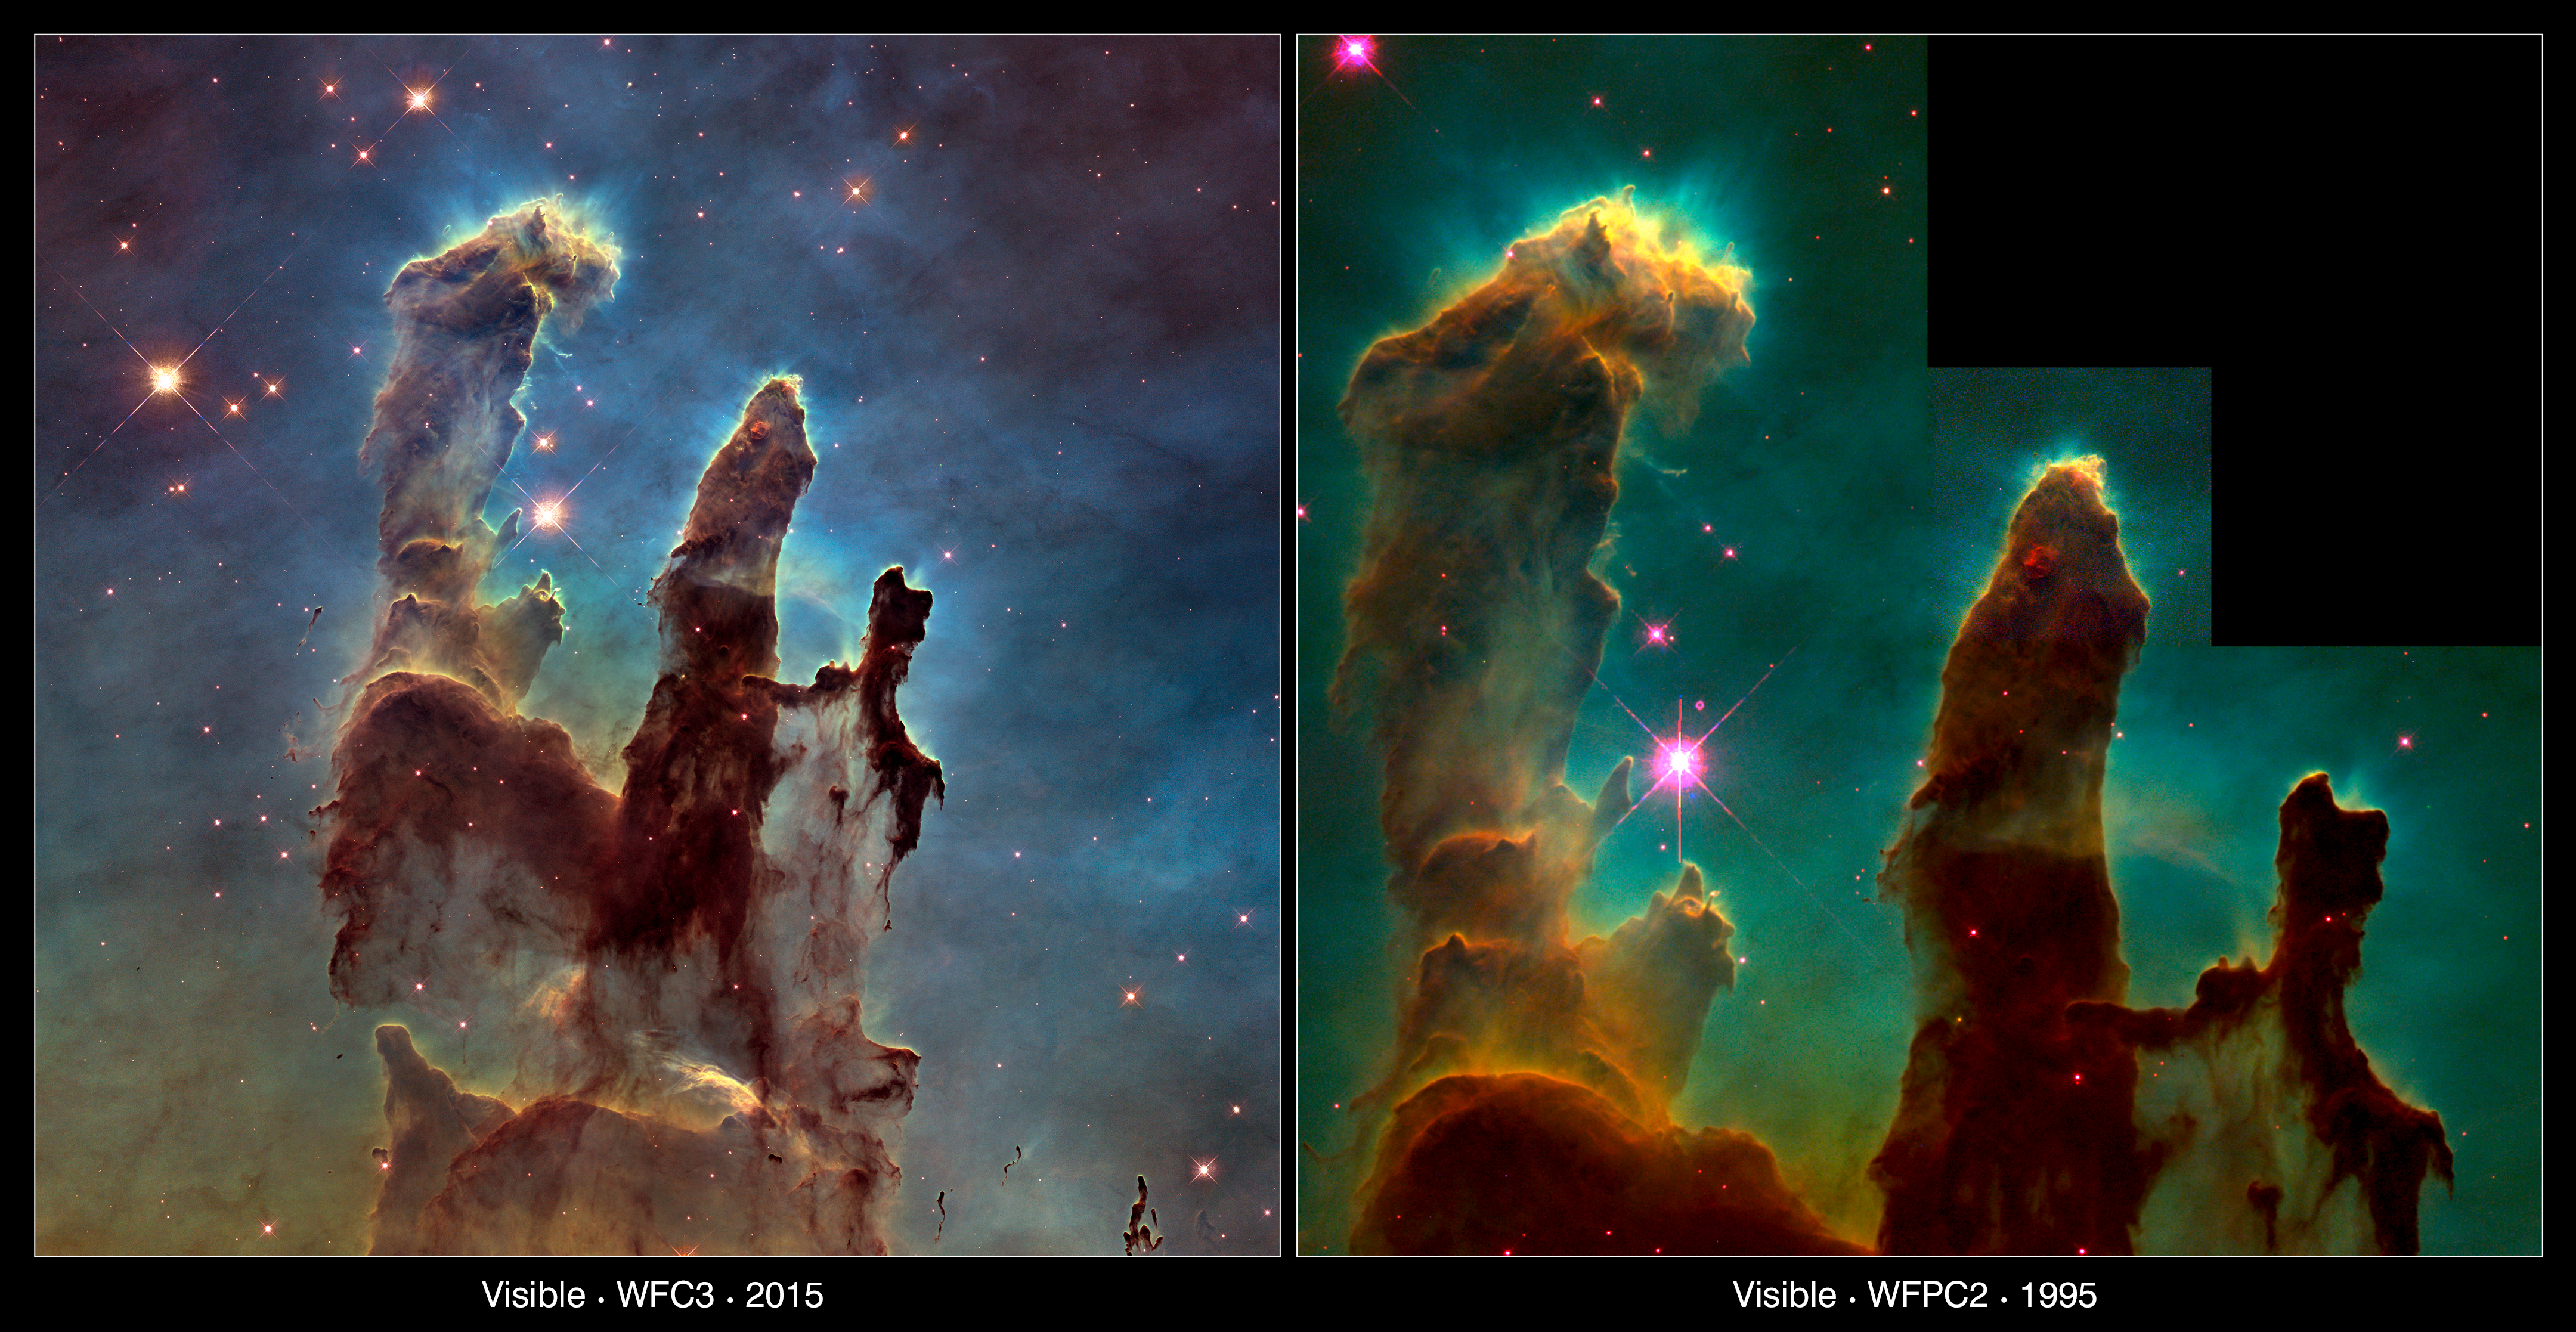

The Pillars of Creation — 1995 and 2015 comparison

This image compares two views of the Eagle Nebula’s Pillars of Creation taken with Hubble 20 years apart.

The new image, on the left, captures almost exactly the same region as in the 1995, on the right. However, the newer image uses Hubble’s Wide Field Camera 3, installed in 2009, to capture light from glowing oxygen, hydrogen, and sulphur with greater clarity.

Having both images allows astronomers to study how the structure of the pillars is changing over time.

Credit: WFC3: NASA, ESA/Hubble and the Hubble Heritage Team
WFPC2: NASA, ESA/Hubble, STScI, J. Hester and P. Scowen (Arizona State University)